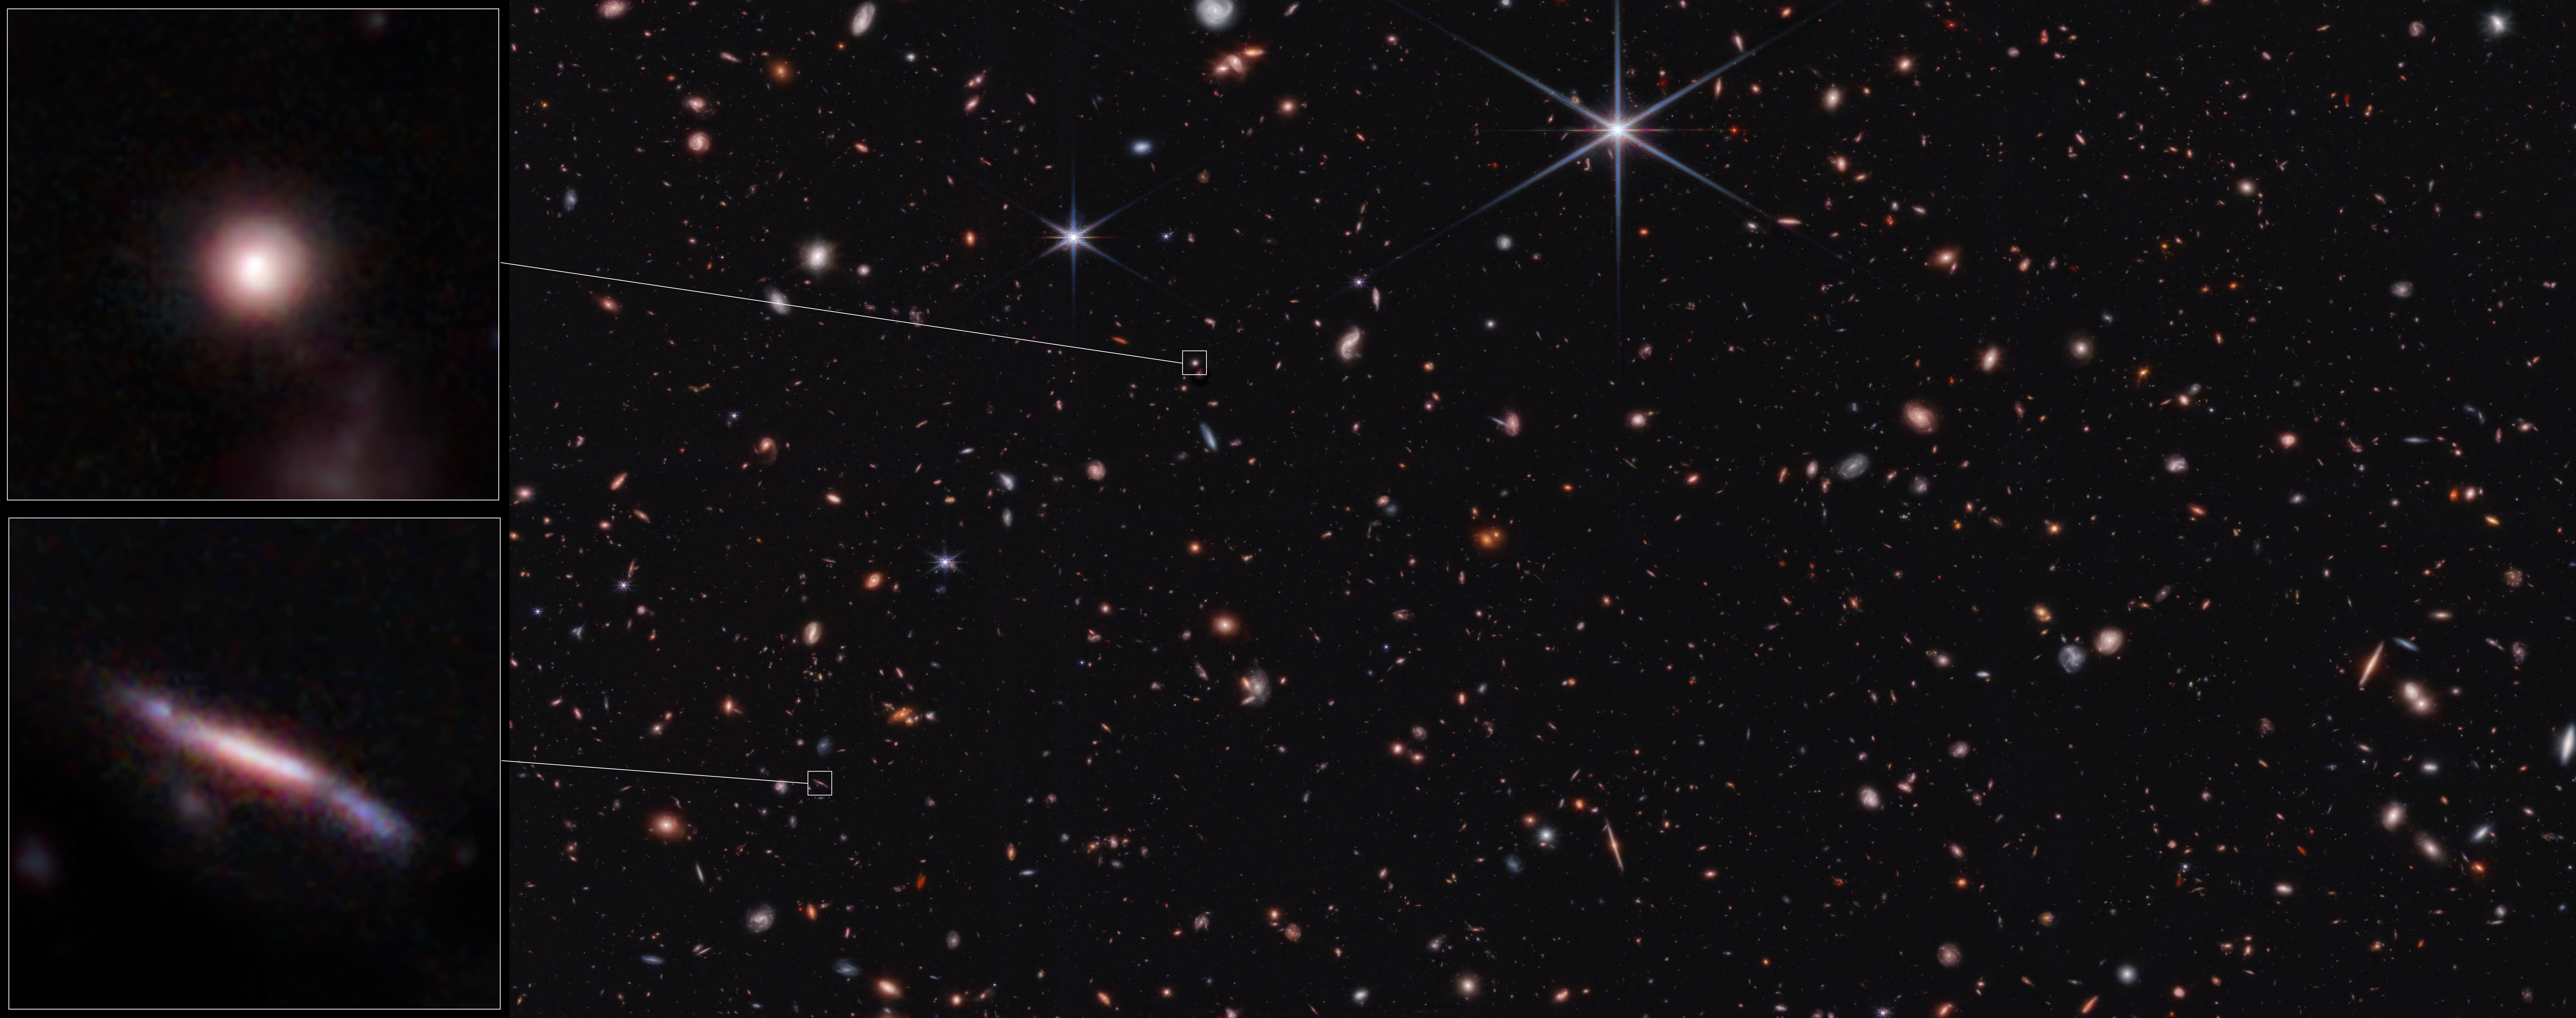

Sample shapes of distant galaxies identified in Webb’s CEERS survey (NIRCam image)

For more than a century, astronomers have categorised galaxies near and far, both by comparing their shapes by eye and precisely measuring their properties with data known as spectra. For example, Edwin Hubble created the Hubble Tuning Fork in 1926 to begin to sort the shapes and sizes of nearby galaxies, showing that many are spirals and ellipticals.

As telescopes’ instruments have become increasingly more sensitive, it is easier to more accurately classify their shapes. New data from the NASA/ESA/CSA James Webb Space Telescope have added nuances to astronomers’ classifications. Since Webb observes in infrared light, many more extremely distant galaxies appear in its images. Plus, the images are finely detailed, allowing researchers to identify if there are additional areas of star formation – or confirm they aren’t present.

A science team has recently analysed hundreds of distant galaxies in Webb’s Cosmic Evolution Early Release Science (CEERS) Survey. CEERS intentionally covers much of the same area as the Hubble Space Telescope’s Extended Groth Strip, which was one of the five fields used to create the Cosmic Assembly Near-infrared Deep Extragalactic Legacy Survey (CANDELS). This allowed them to double-check Webb’s results where the telescopes’ observations overlap.

The analysis of Webb’s galaxies was very consistent with galaxies in the Hubble Space Telescope catalogue. The team began their analysis by sorting the galaxies into broad classes based on similar characteristics. (They did not classify each galaxy’s individual appearance since that would require detailed information from data known as spectra.)

They found an array of odd shapes when the Universe was 600 million to 6 billion years old. The galaxy shapes that dominate look flat and elongated, like pool noodles or surfboards. These two galaxy types make up approximately 50 to 80% of all the distant galaxies they studied – a surprise, since these shapes are rare closer to home.

Other galaxies Webb detected appear round but also flattened, like frisbees. The least populated category is made up of galaxies that are shaped like spheres or volleyballs.

Webb’s data also resolved a riddle that was introduced by the Hubble Space Telescope’s observations decades ago. Why do so many distant galaxies appear like long lines? Was there more to the galaxies that didn’t appear in its images? Webb answered this in short order: Hubble hasn’t missed anything.

Why do galaxies have such different shapes early in the history of the Universe? This question remains unanswered for now, but research is underway to better understand how galaxies evolved over all of cosmic time.

Credit: NASA, ESA, CSA, STScI, S. Finkelstein (UT Austin), M. Bagley (UT Austin), R. Larson (UT Austin)